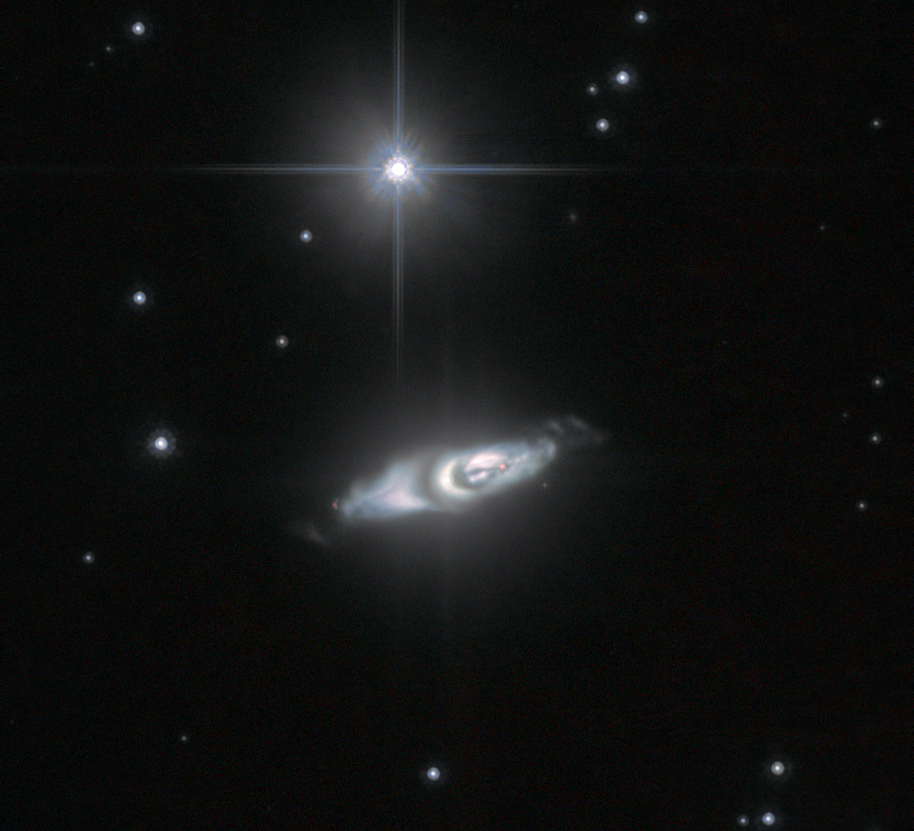

The very curious creation of an ageing star

The NASA/ESA Hubble Space Telescope has made a rare celestial catch. Close to a bright, nearby star in this image, the bizarre, whorl-shaped object known as IRAS 22036+5306 has been captured during a brief tumultuous period late in a star's life.

Inside IRAS 22036+5306 lies an aged star that has coughed off almost all of its outer material, forming a cloud in space. Hidden under this veil, the dense, still-burning, exposed core of the star grows hotter. Encircling the star is a torus consisting partly of castoff material, as well as possibly the grainy remnants of comets and other small, rocky bodies. Twin jets spout from the star’s poles and pierce this dusty waist. The jets contain gobbets of material — typically about ten thousand times the mass of the Earth — hurling outwards at a speed of nearly 800 000 kilometres per hour.

IRAS 22036+5306 is making the transition through the protoplanetary, or preplanetary, nebula phase. Only a few hundred such nebulae have been spotted in our galaxy. For now, light from the central star is merely being reflected off its expelled gaseous shell. Soon, however, the star will become a very hot, white dwarf, and its intense ultraviolet radiation will ionise the blown-off gas, making it glow in rich colours. IRAS 22036+5306 will have then blossomed into a fully-fledged planetary nebula, and this event will serve as a last hurrah before the star starts its very slow final cool-down.

Planetary nebulae are much longer-lived than their precursors, protoplanetary nebulae, and are therefore more commonly spotted. The term planetary nebula is a leftover from observations through small telescopes made by early astronomers to whom some of these objects looked circular and similar in appearance to the outer planets Uranus and Neptune.

IRAS 22036+5306 is found about 6500 light-years away in the constellation of Cepheus (The King). Studying rarities such as IRAS 22036+5306 provides astronomers with a window into the short and poorly understood phase of stellar evolution when bloated red giant stars pare down to small white dwarfs. For example, mysteries remain about how exactly the dusty torus and jets form. The planetary nebula phase is thought to be the fate that awaits most medium-sized stars, including our Sun. But it is not clear that our star will make such a fuss on its way out — the star that generated all the gaseous splendour of IRAS 22036+5306 is reckoned to have been at least four times the mass of the Sun.

The image was obtained with the High Resolution Channel of Hubble’s Advanced Camera for Surveys. The picture has been made from images through a yellow/orange filter (F606W, coloured blue), a near-infrared filter (F814W, coloured orange) and a filter that lets through the red glow of hydrogen (F658N, coloured red). The total exposure times per filter were 1600 s, 3200 s and 5104 s, respectively and the field of view is about 22 arcseconds across.

Credit: ESA/Hubble & NASA